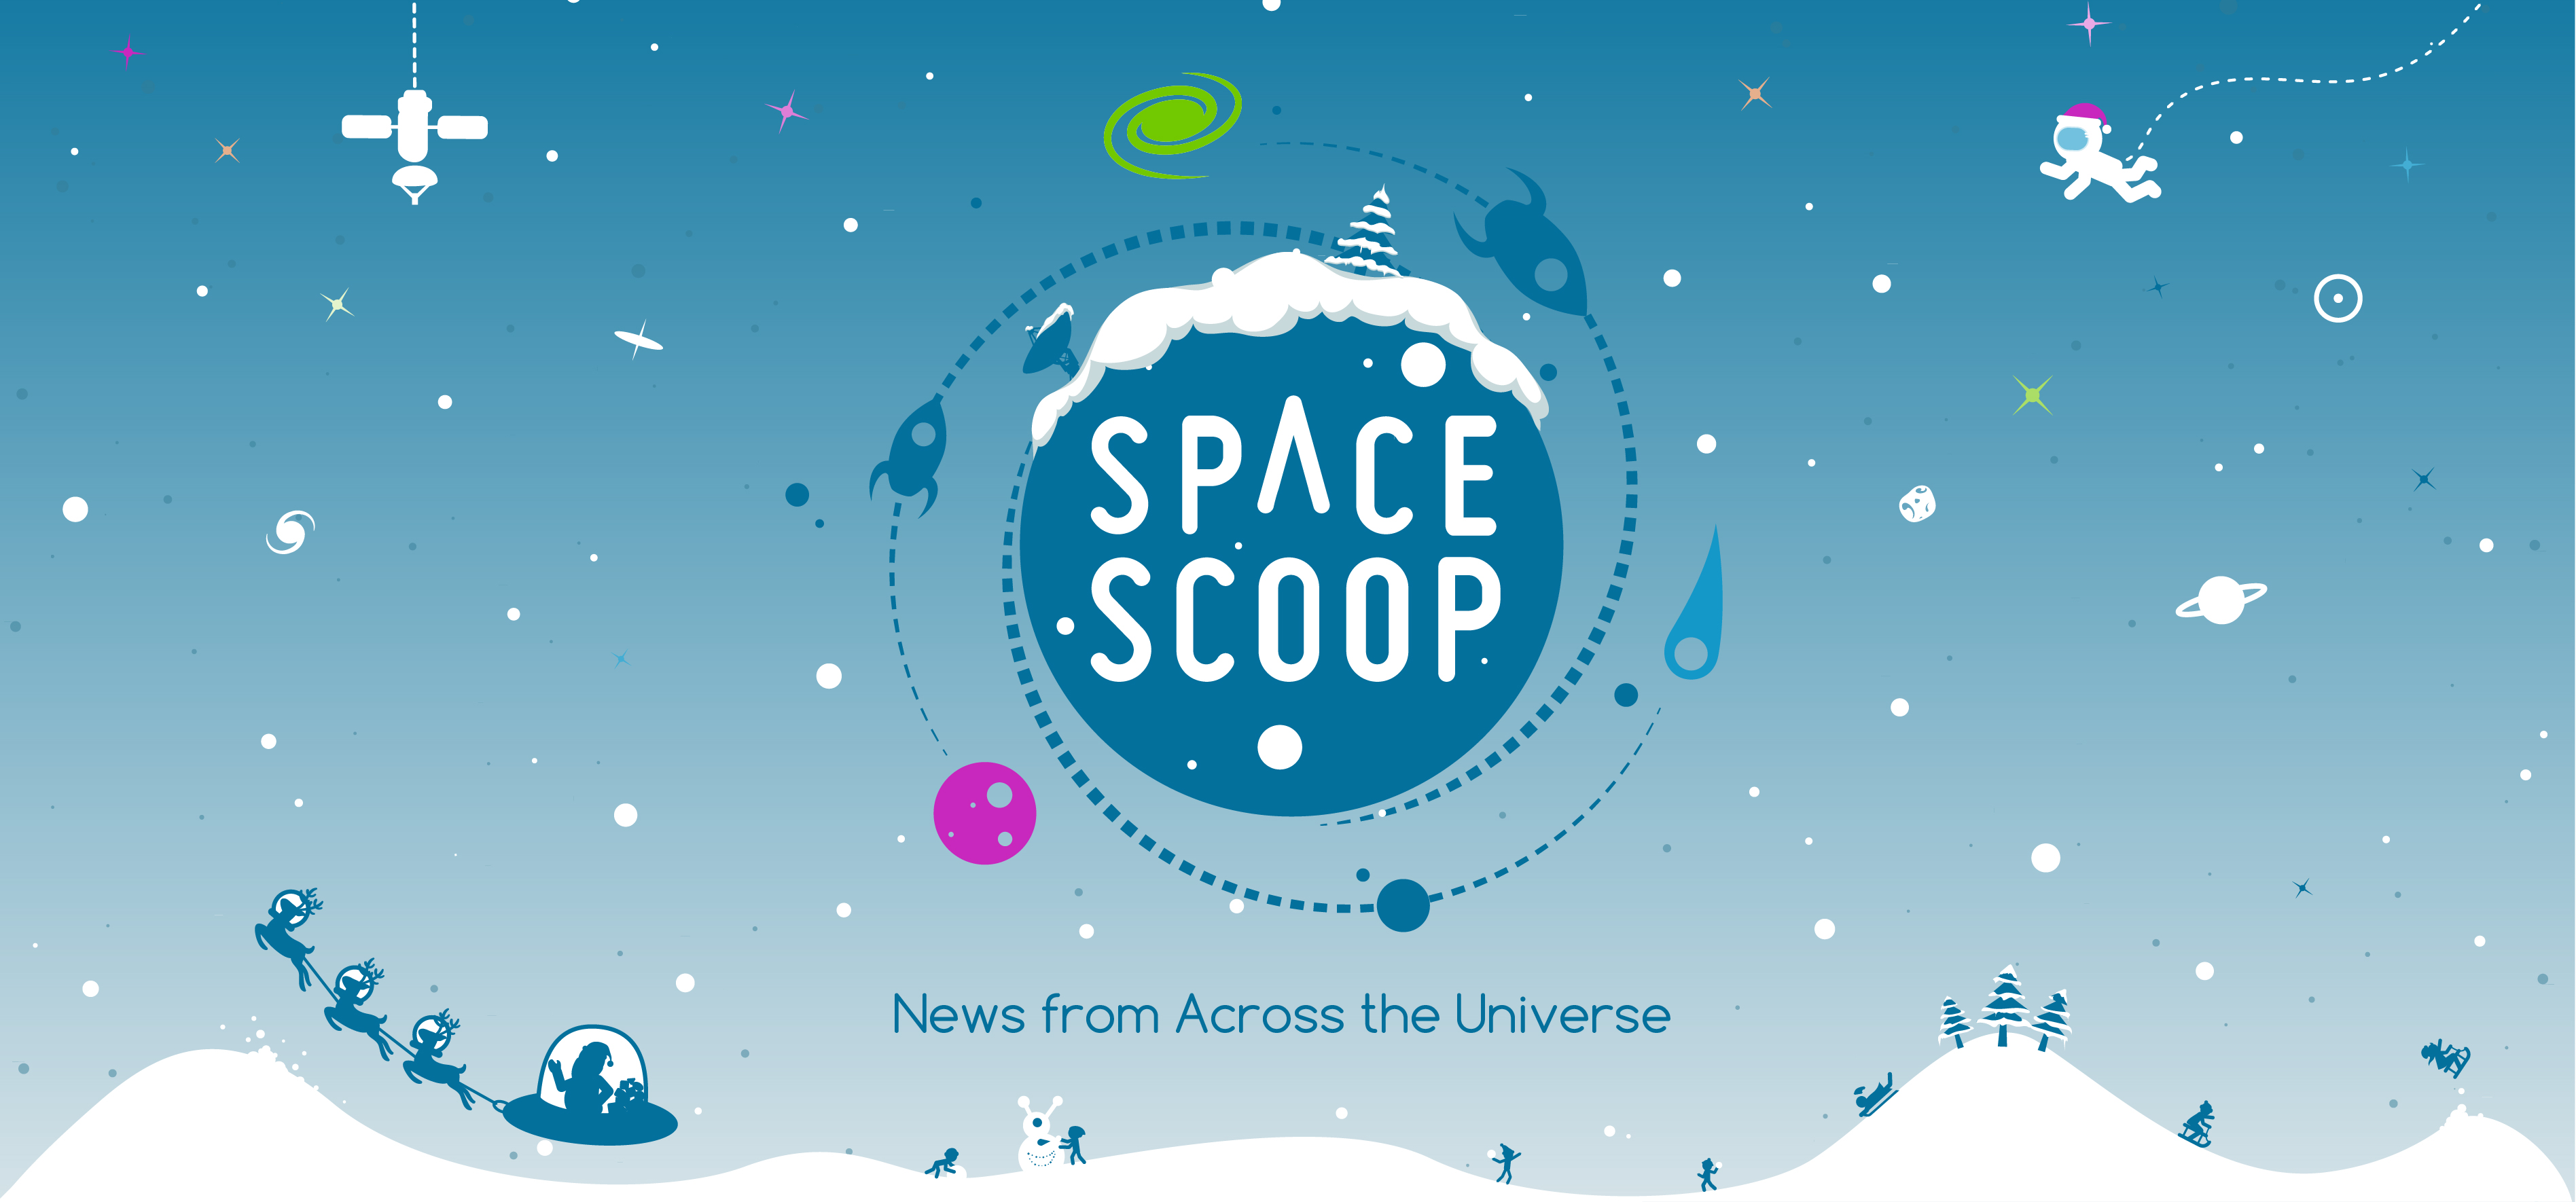

Banner of the new Space Scoop webpage

This image shows a banner of the new Space Scoop webpage, launched in December 2015, in Christmas style.

Credit: Space Scoop